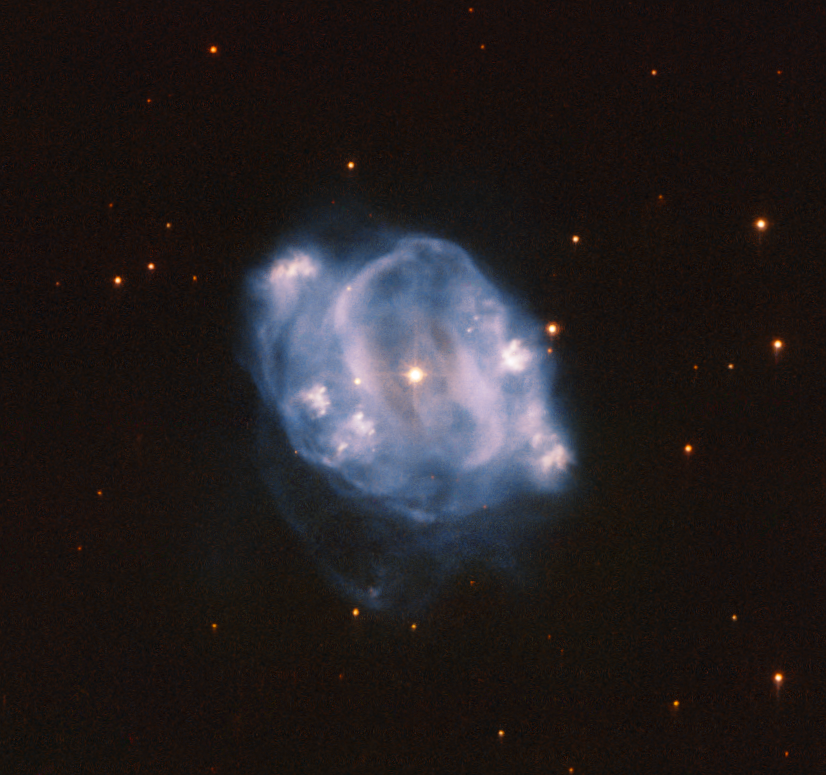

A Passing Fancy

This Picture of the Week from the NASA/ESA Hubble Space Telescope shows NGC 5307, a planetary nebula which lies about 10000 light years from Earth. It can be seen in the constellation Centaurus (The Centaur), which can be seen primarily in the southern hemisphere. A planetary nebula is the final stage of a Sun-like star. As such, planetary nebulae allow us a glimpse into the future of our own Solar System. A star like our Sun will, at the end of its life, transform into a red giant. Stars are sustained by the nuclear fusion that occurs in their core, which creates energy. The nuclear fusion processes constantly try to rip the star apart. Only the gravity of the star prevents this from happening.

At the end of the red giant phase of a star, these forces become unbalanced. Without enough energy created by fusion, the core of the star collapses in on itself, while the surface layers are ejected outward. After that, all that remains of the star is what we see here: glowing outer layers surrounding a white dwarf star, the remnants of the red giant star’s core.

This isn’t the end of this star’s evolution though — those outer layers are still moving and cooling. In just a few thousand years they will have dissipated, and all that will be left to see is the dimly glowing white dwarf.

Credit: ESA/Hubble & NASA, R. Wade et al.